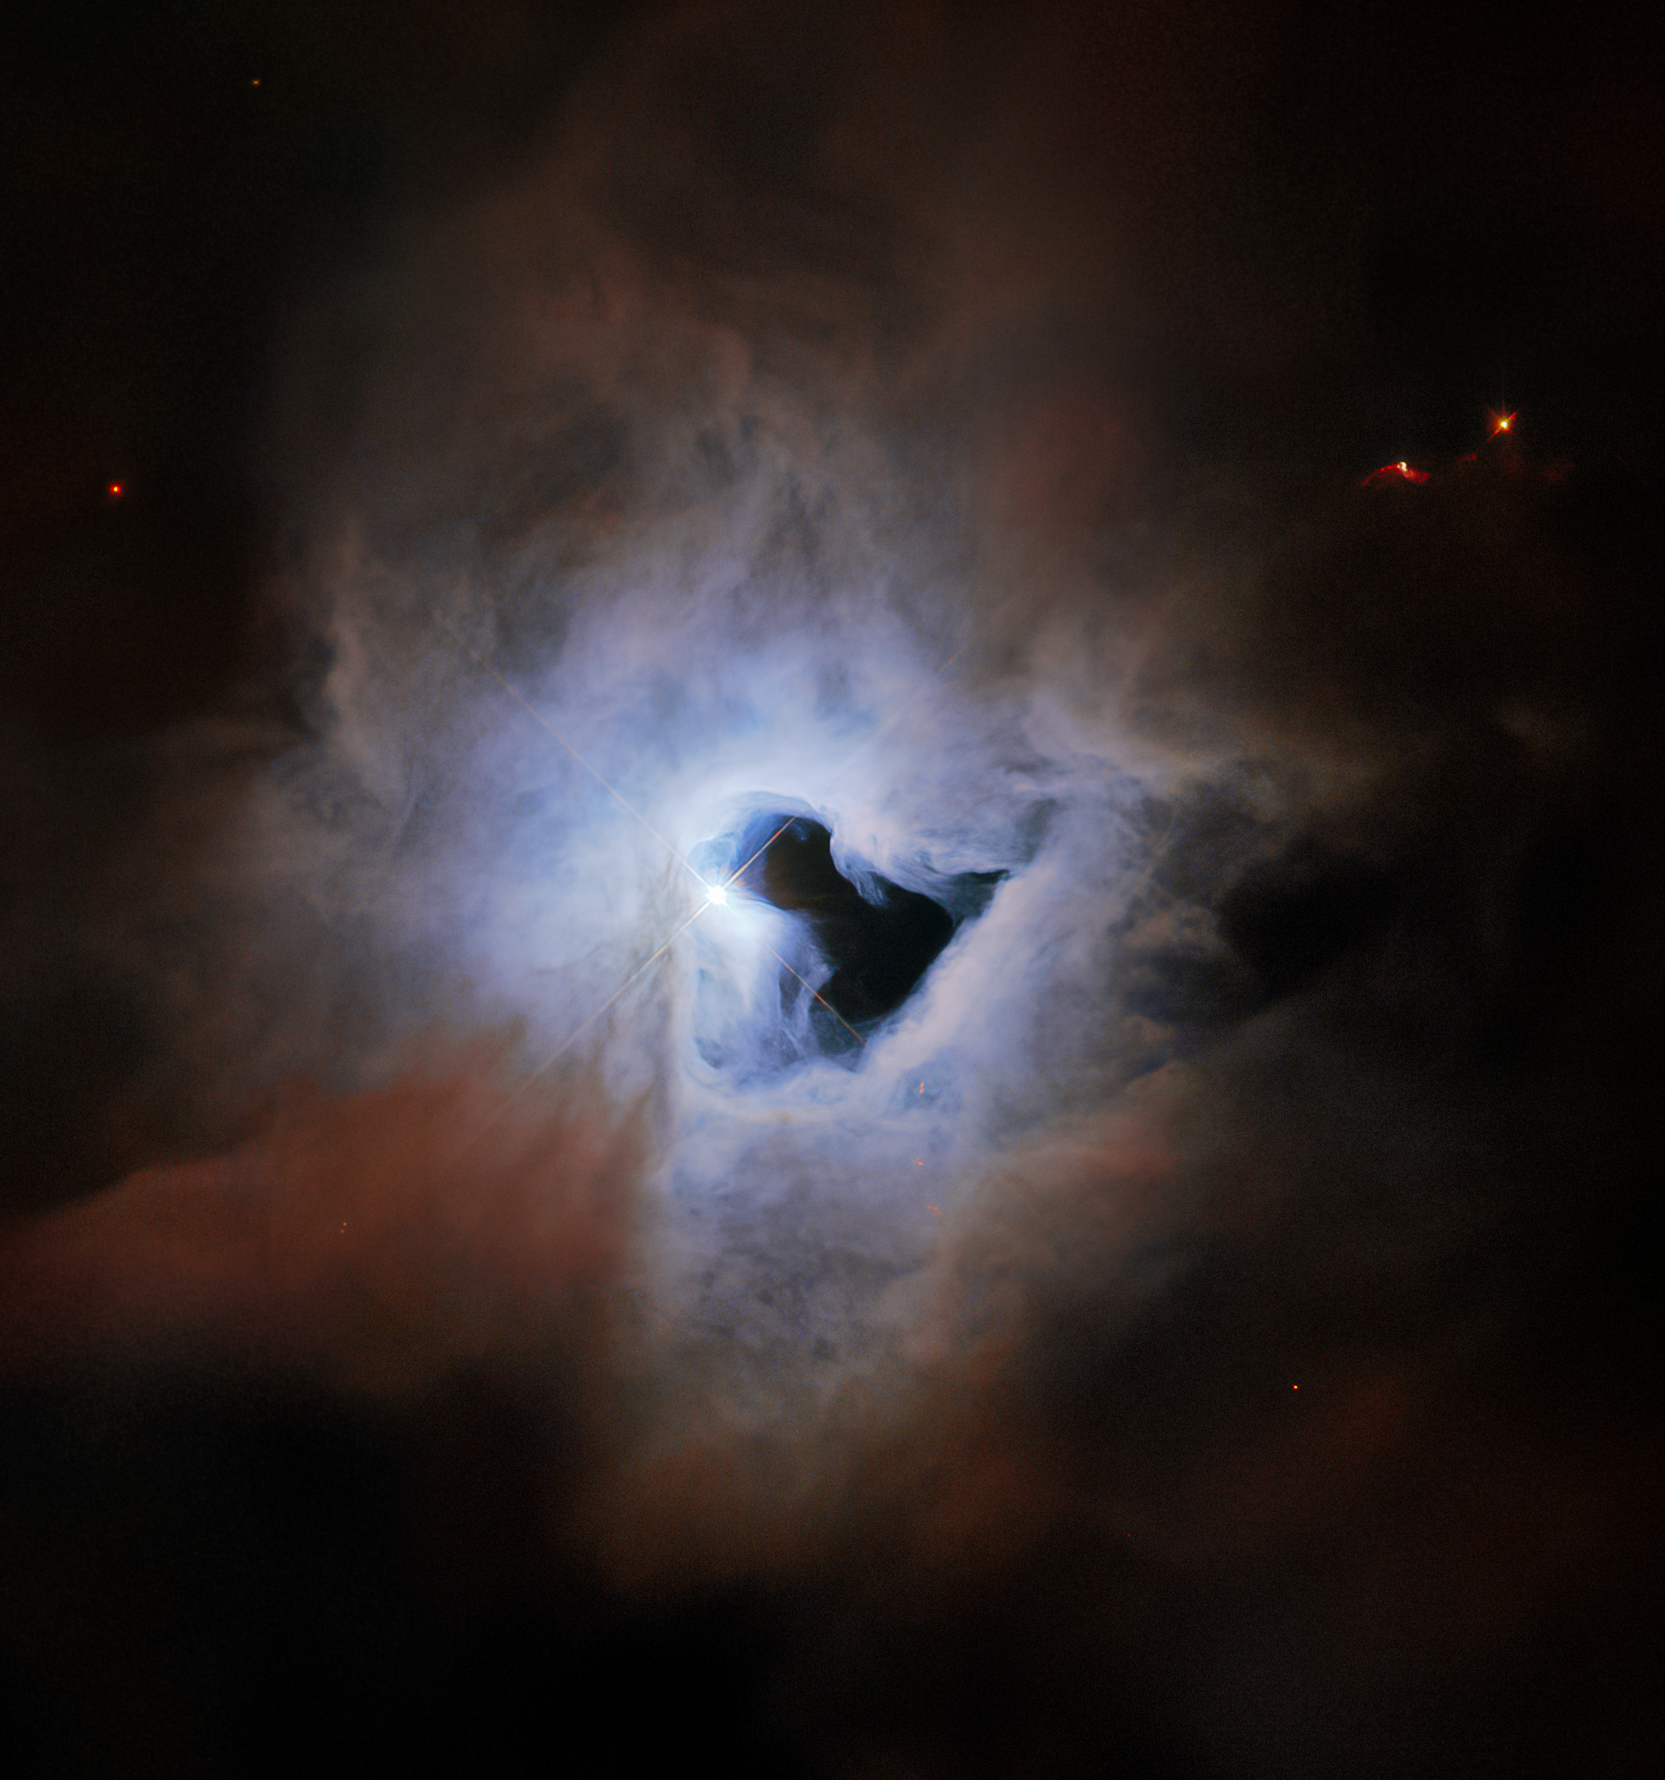

Cosmic Keyhole

This peculiar portrait from the NASA/ESA Hubble Space Telescope showcases NGC 1999, a reflection nebula in the constellation Orion. NGC 1999 is around 1350 light-years from Earth and lies near to the Orion Nebula, the closest region of massive star formation to Earth. NGC 1999 itself is a relic of recent star formation — it is composed of detritus left over from the formation of a newborn star.

Just like fog curling around a street lamp, reflection nebulae like NGC 1999 only shine because of the light from an embedded source. In the case of NGC 1999, this source is the aforementioned newborn star V380 Orionis which is visible at the centre of this image. The most notable aspect of NGC 1999’s appearance, however, is the conspicuous hole in its centre, which resembles an inky-black keyhole of cosmic proportions.

This image was created from archival Wide Field Planetary Camera 2 observations that date from shortly after Servicing Mission 3A in 1999. At the time, astronomers believed that the dark patch in NGC 1999 was something called a Bok globule — a dense, cold cloud of gas, molecules, and cosmic dust that blots out background light. However, follow-up observations using a collection of telescopes including ESA’s Herschel Space Observatory revealed that the dark patch is actually an empty region of space. The origin of this unexplained rift in the heart of NGC 1999 remains unknown.

Credit: ESA/Hubble & NASA, ESO, K. Noll